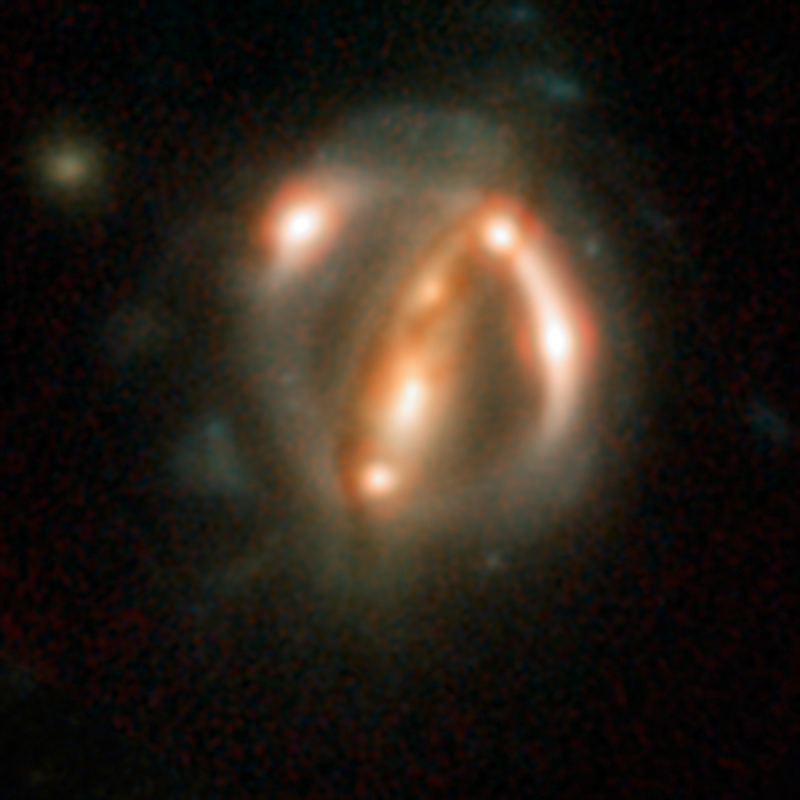

Lensed quasar

B1608+656 is among the five best lensed quasars discovered to date. The two foreground galaxies smeared the light of the more distant quasar's host galaxy into bright arcs.

Credit: ESA/Hubble, NASA, Suyu et al.